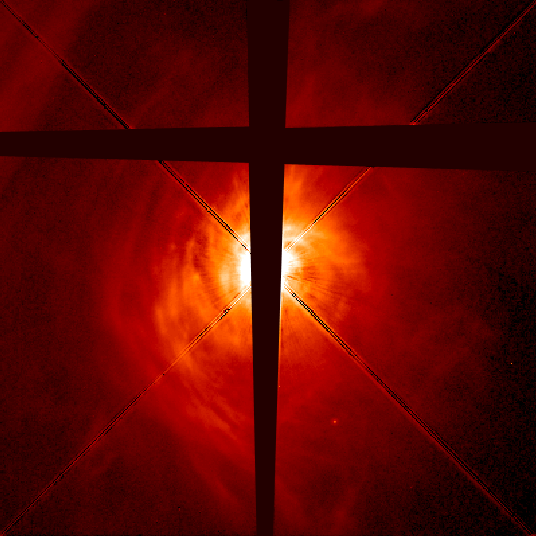

AB Aurigae disk (Hubble view)

The Hubble telescope image on the right shows a windowpane-shaped occulting bar -- the dark bands running vertically through the middle of the image and horizontally across the upper part of it. The occulting bar covers the innermost part of the disk and star, about 7.1 billion miles (11.5 billion kilometers) or 1.4 times our solar system's diameter. The diagonal lines are the remnants of the diffraction spikes produced in Hubble telescope images of bright stars.

Credit: C.A. Grady (National Optical Astronomy Observatories, NASA/ESA Goddard Space Flight Center), B. Woodgate (NASA/ESA Goddard Space Flight Center), F. Bruhweiler and A. Boggess (Catholic University of America), P. Plait and D. Lindler (ACC, Inc., Goddard Space Flight Center), M. Clampin ( Space Telescope Science Institute), and NASA/ESA, P. Kalas (SpaceTelescope Science Institute)